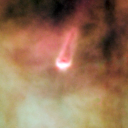

154-240

One of 42 new proplyds discovered in the Orion Nebula, 154-240 is one of the bright proplyds that lies relatively close to the nebula’s brightest star, Theta 1 Orionis C. This tadpole-shaped tail is actually a jet of matter flowing away from the excited cusp.

Credit: NASA/ESA and L. Ricci (ESO)